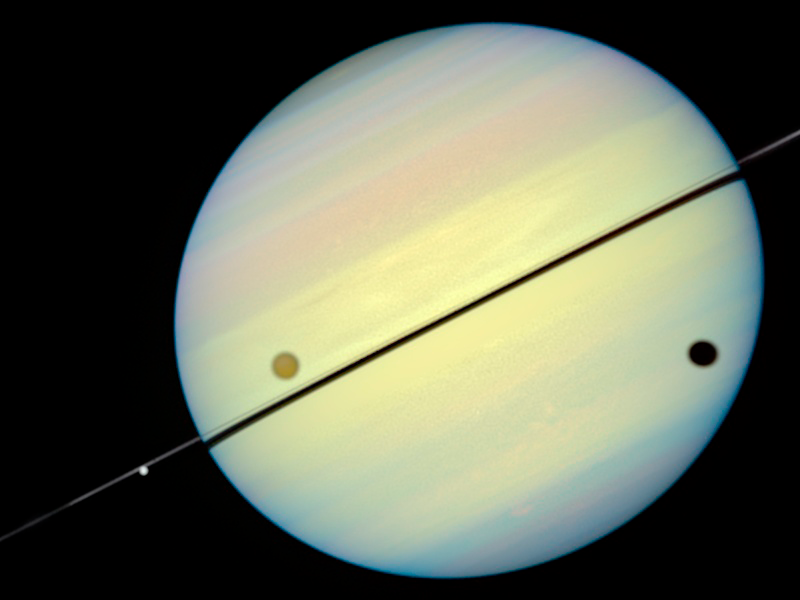

Hubble Catches Titan Chasing Its Shadow - Frame 1

This movie still shows Titan chasing its shadow across Saturn's disk. The still is from a movie created from images taken by NASA/ESA Hubble Space Telescope. It reveals the planet's rings tilted nearly edge-on toward the Earth, an event that occurs once every 15 years.

Credit: NASA/ESA and E. Karkoschka (University of Arizona)